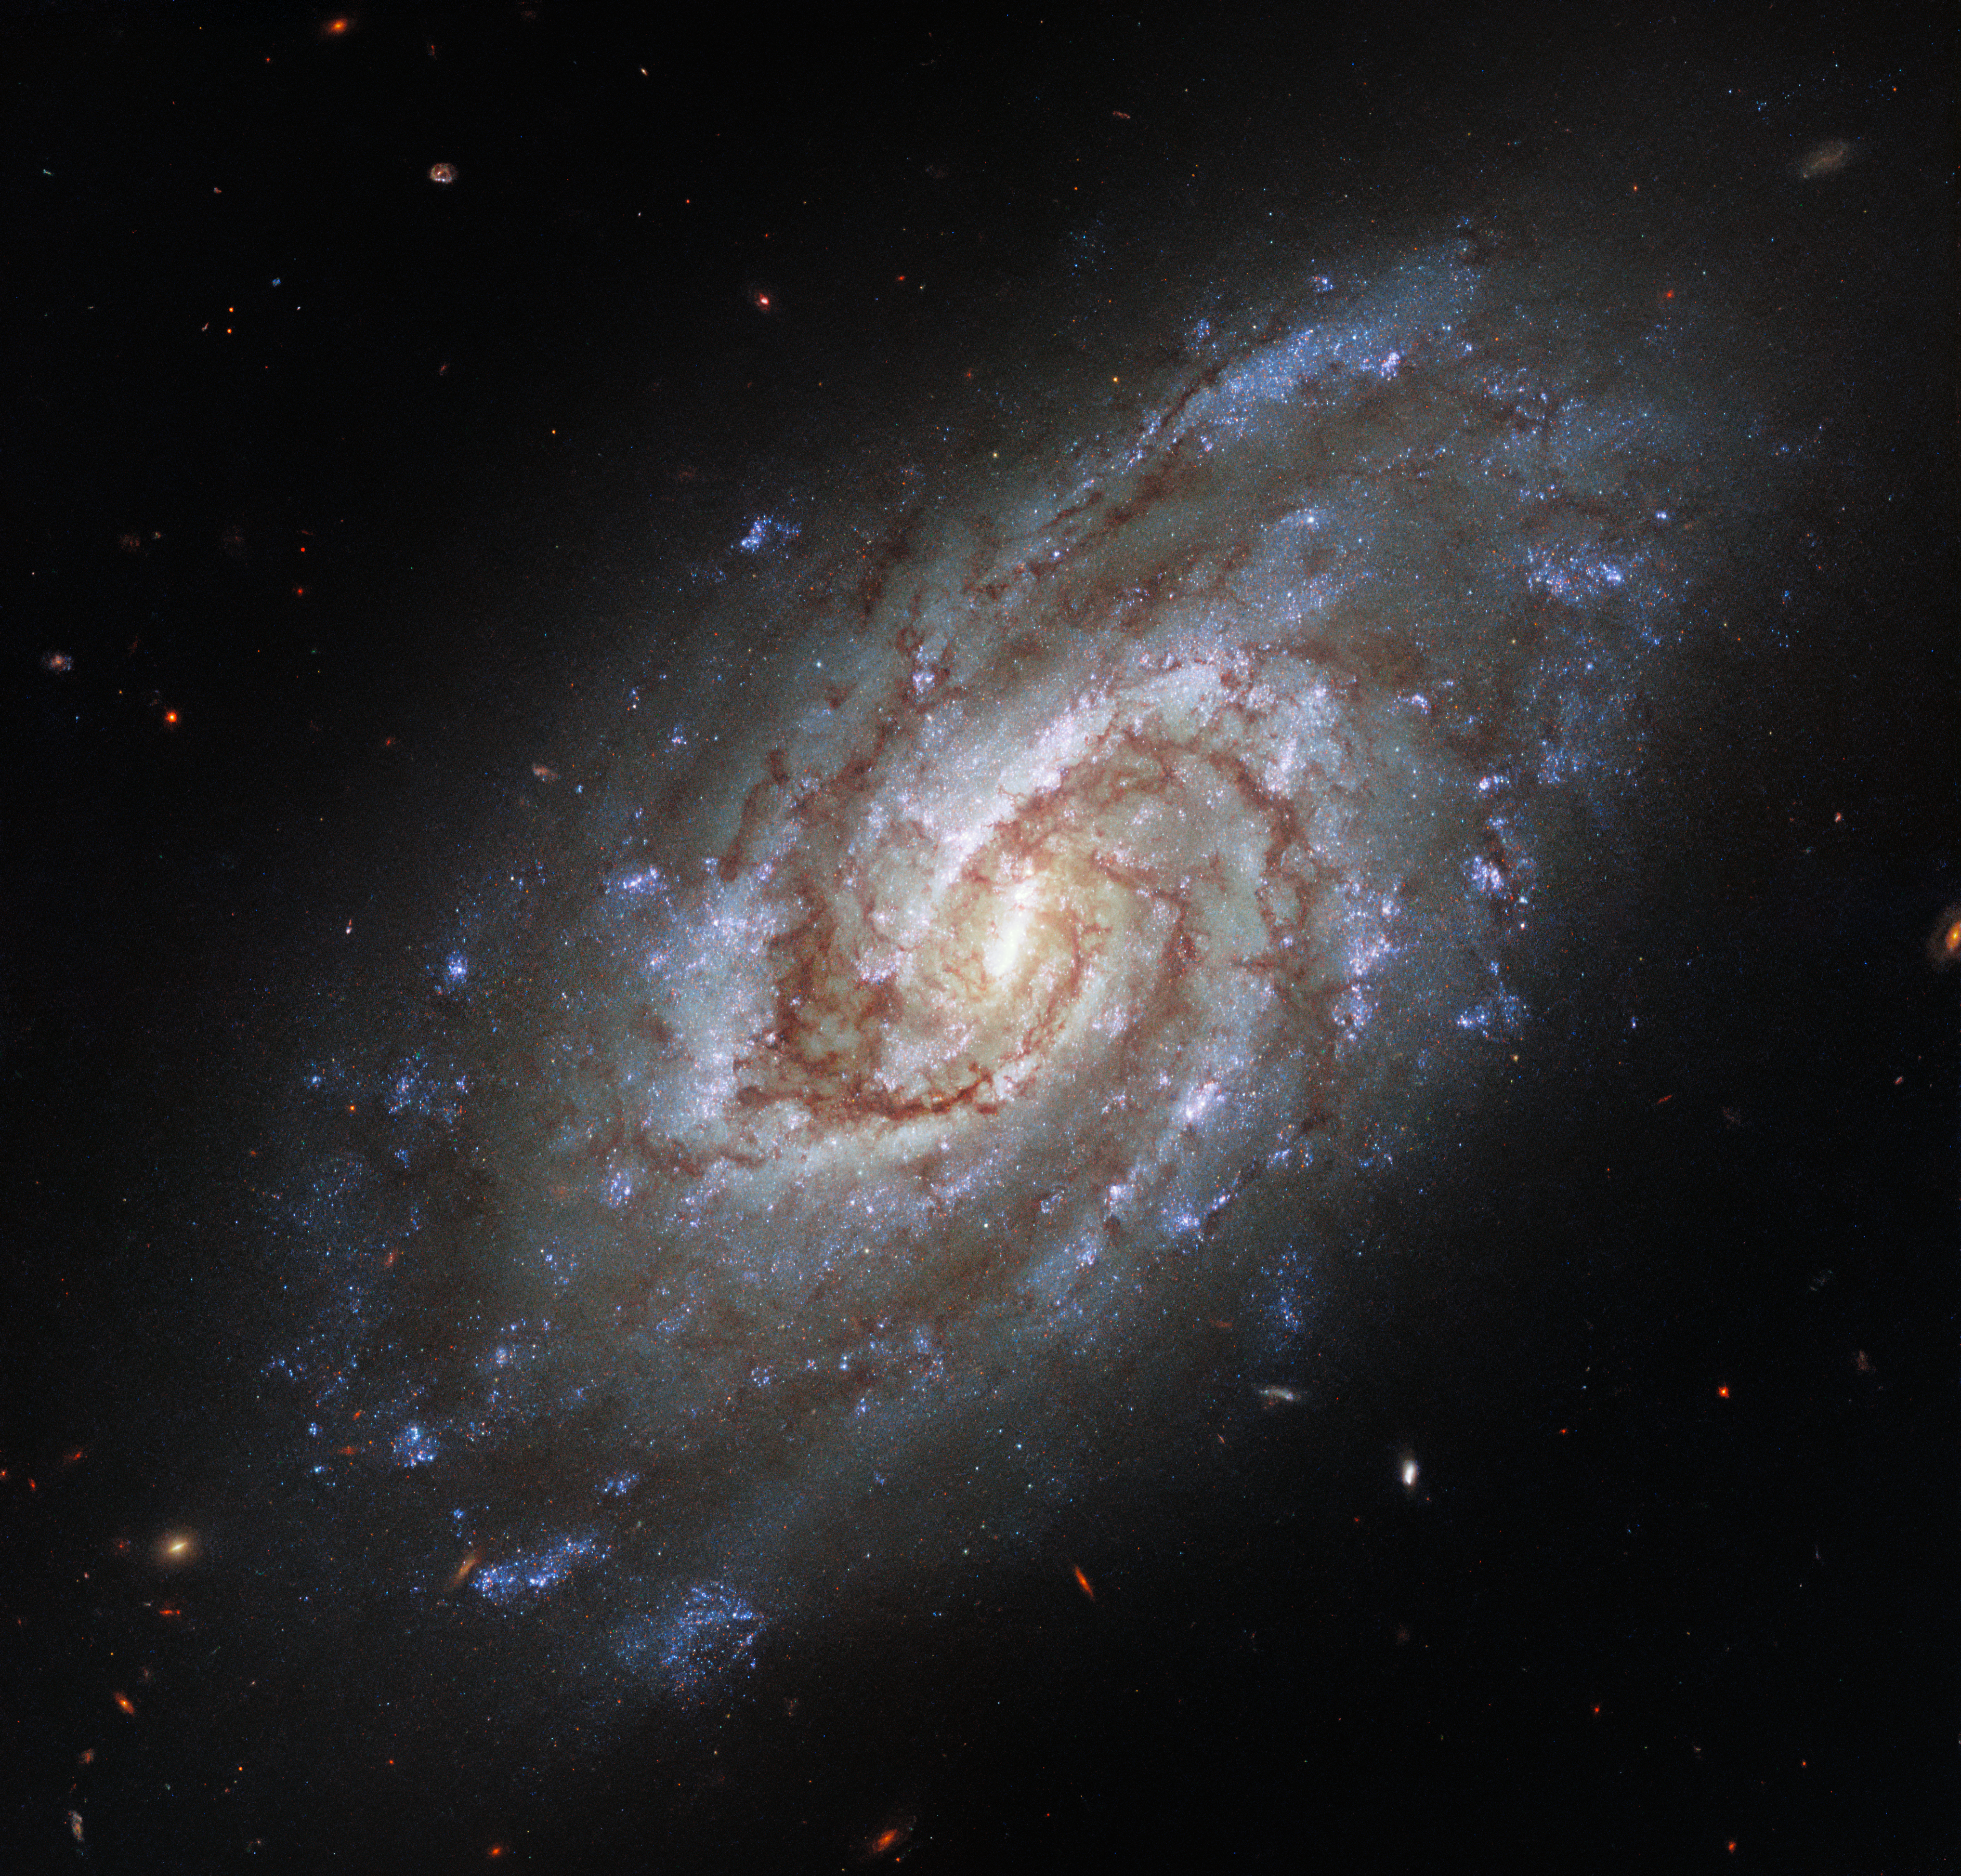

Portrait of a Swirling Galaxy

The spiral galaxy IC 1954 takes centre stage in this image from the NASA/ESA Hubble Space Telescope. The galaxy, which lies approximately 45 million light-years from Earth in the constellation Horologium (The Clock), boasts a bright central bar and lazily winding spiral arms threaded with dark clouds of dust.

This portrait of IC 1954 was captured with Hubble’s Wide Field Camera 3, and is one of a set of observations designed to take advantage of some telescope teamwork. Hubble observed groups of young stars in nearby galaxies at ultraviolet and optical wavelengths while the Atacama Large Millimeter/submillimeter Array — a ground-based radio telescope — gathered data on star-forming discs and clouds of cold gas. Combining the two sets of observations allowed astronomers to join the dots and understand the connections between young stars and the clouds of cold gas which give rise to them.

These observations also lay the groundwork for future observations with the upcoming NASA/ESA/CSA James Webb Space Telescope, which will peer into nearby galaxies and observe the earliest phases of star formation.

Credit: ESA/Hubble & NASA, J. Lee and the PHANGS-HST Team